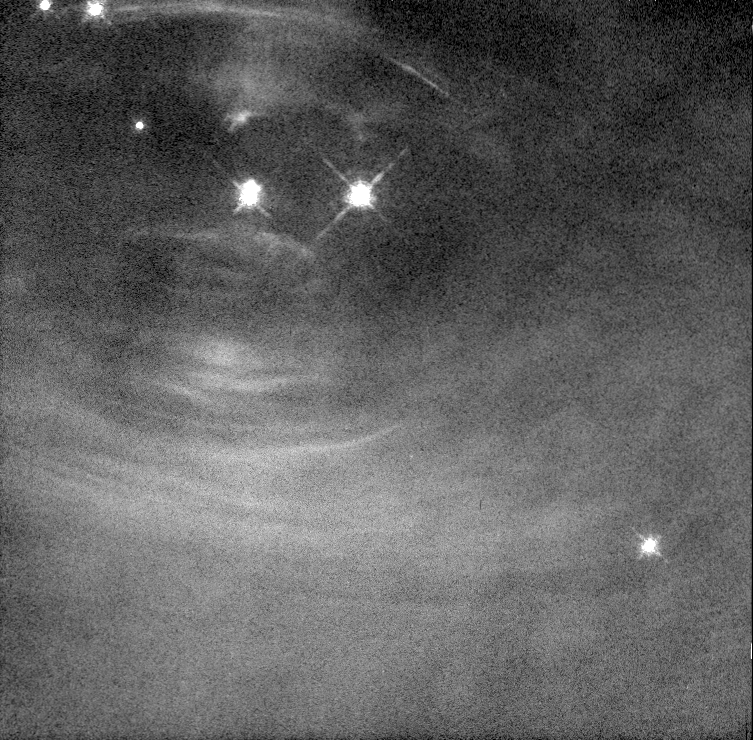

Changes in the Inner Crab Pulsar

Scientists are learning more about how pulsars work by studying a series of Hubble Space Telescope images of the heart of the Crab Nebula. The images, taken over a period of several months, show that the Crab is a far more dynamic object than previously understood.

Credit: Jeff Hester and Paul Scowen (Arizona State University), and NASA/ESA